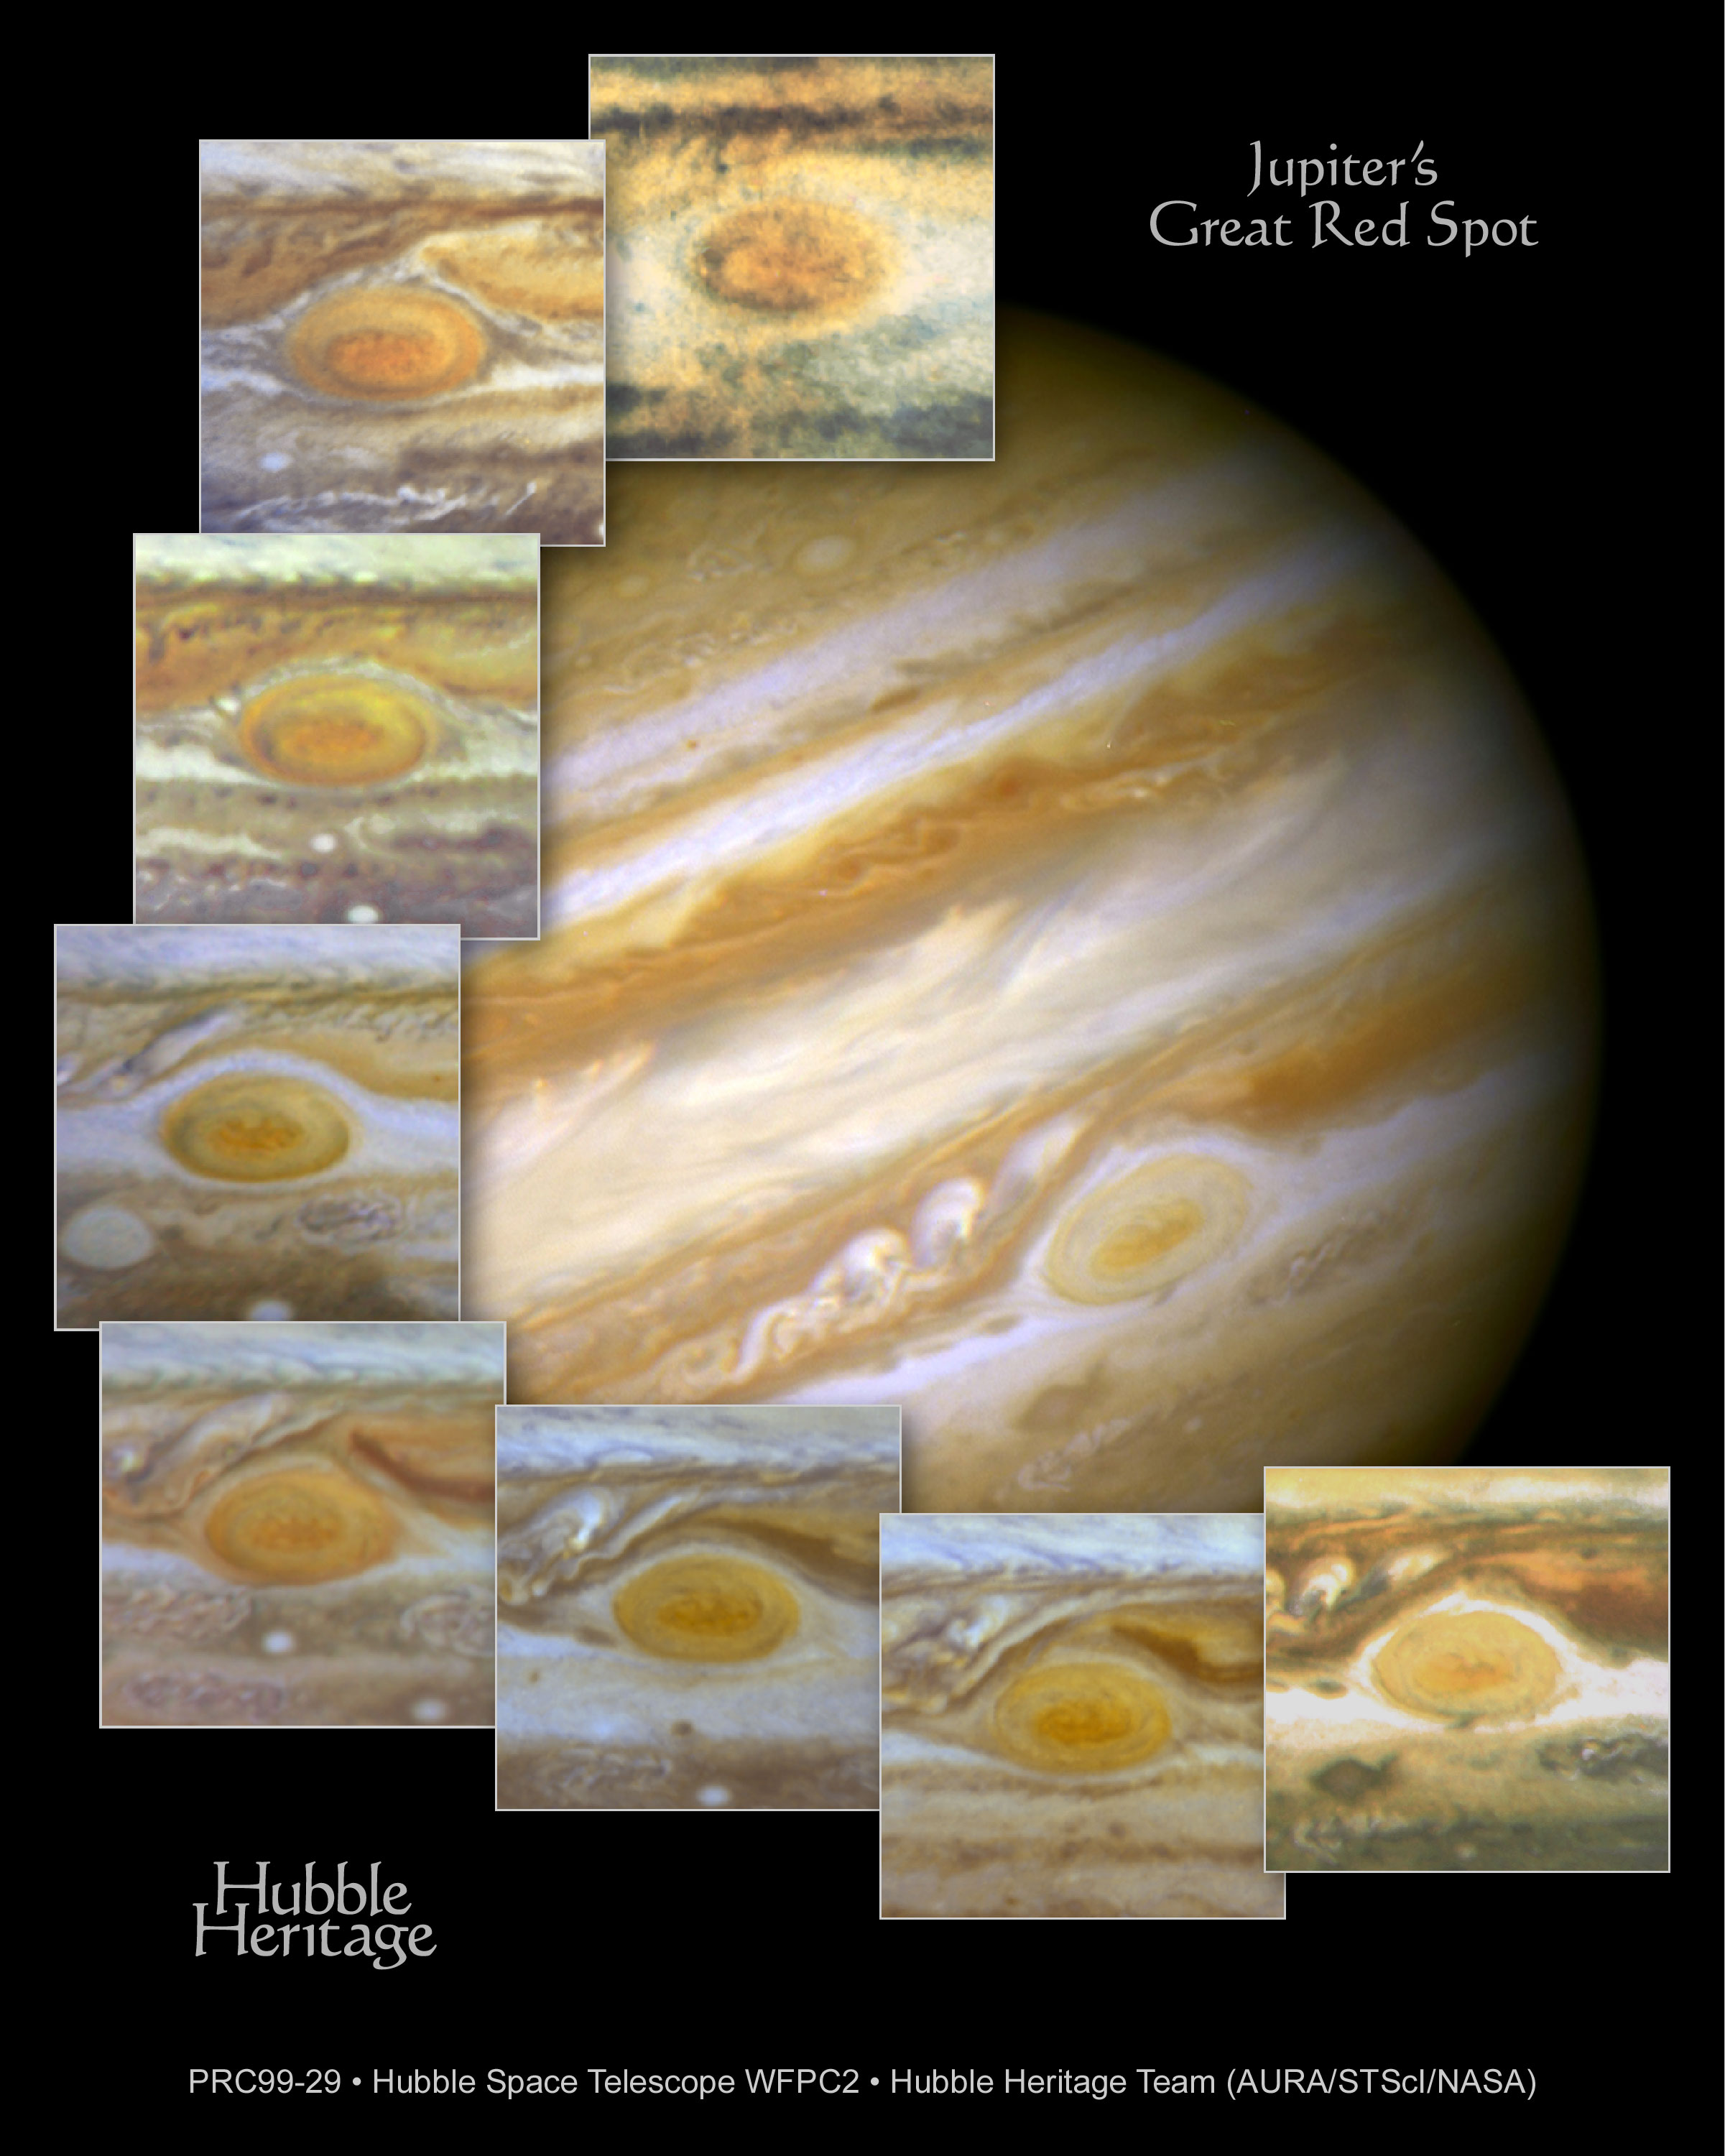

Jupiter's Great Red Spot

When 17th-century astronomers first turned their telescopes to Jupiter, they noted a conspicuous reddish spot on the giant planet. This Great Red Spot is still present in Jupiter's atmosphere, more than 300 years later. It is now known that it is a vast storm, spinning like a cyclone. Unlike a low-pressure hurricane in the Caribbean Sea, however, the Red Spot rotates in a counterclockwise direction in the southern hemisphere, showing that it is a high-pressure system. Winds inside this Jovian storm reach speeds of about 270 mph.

Credit: Hubble Heritage Team (STScI/AURA/NASA/ESA) and Amy Simon (Cornell U.)